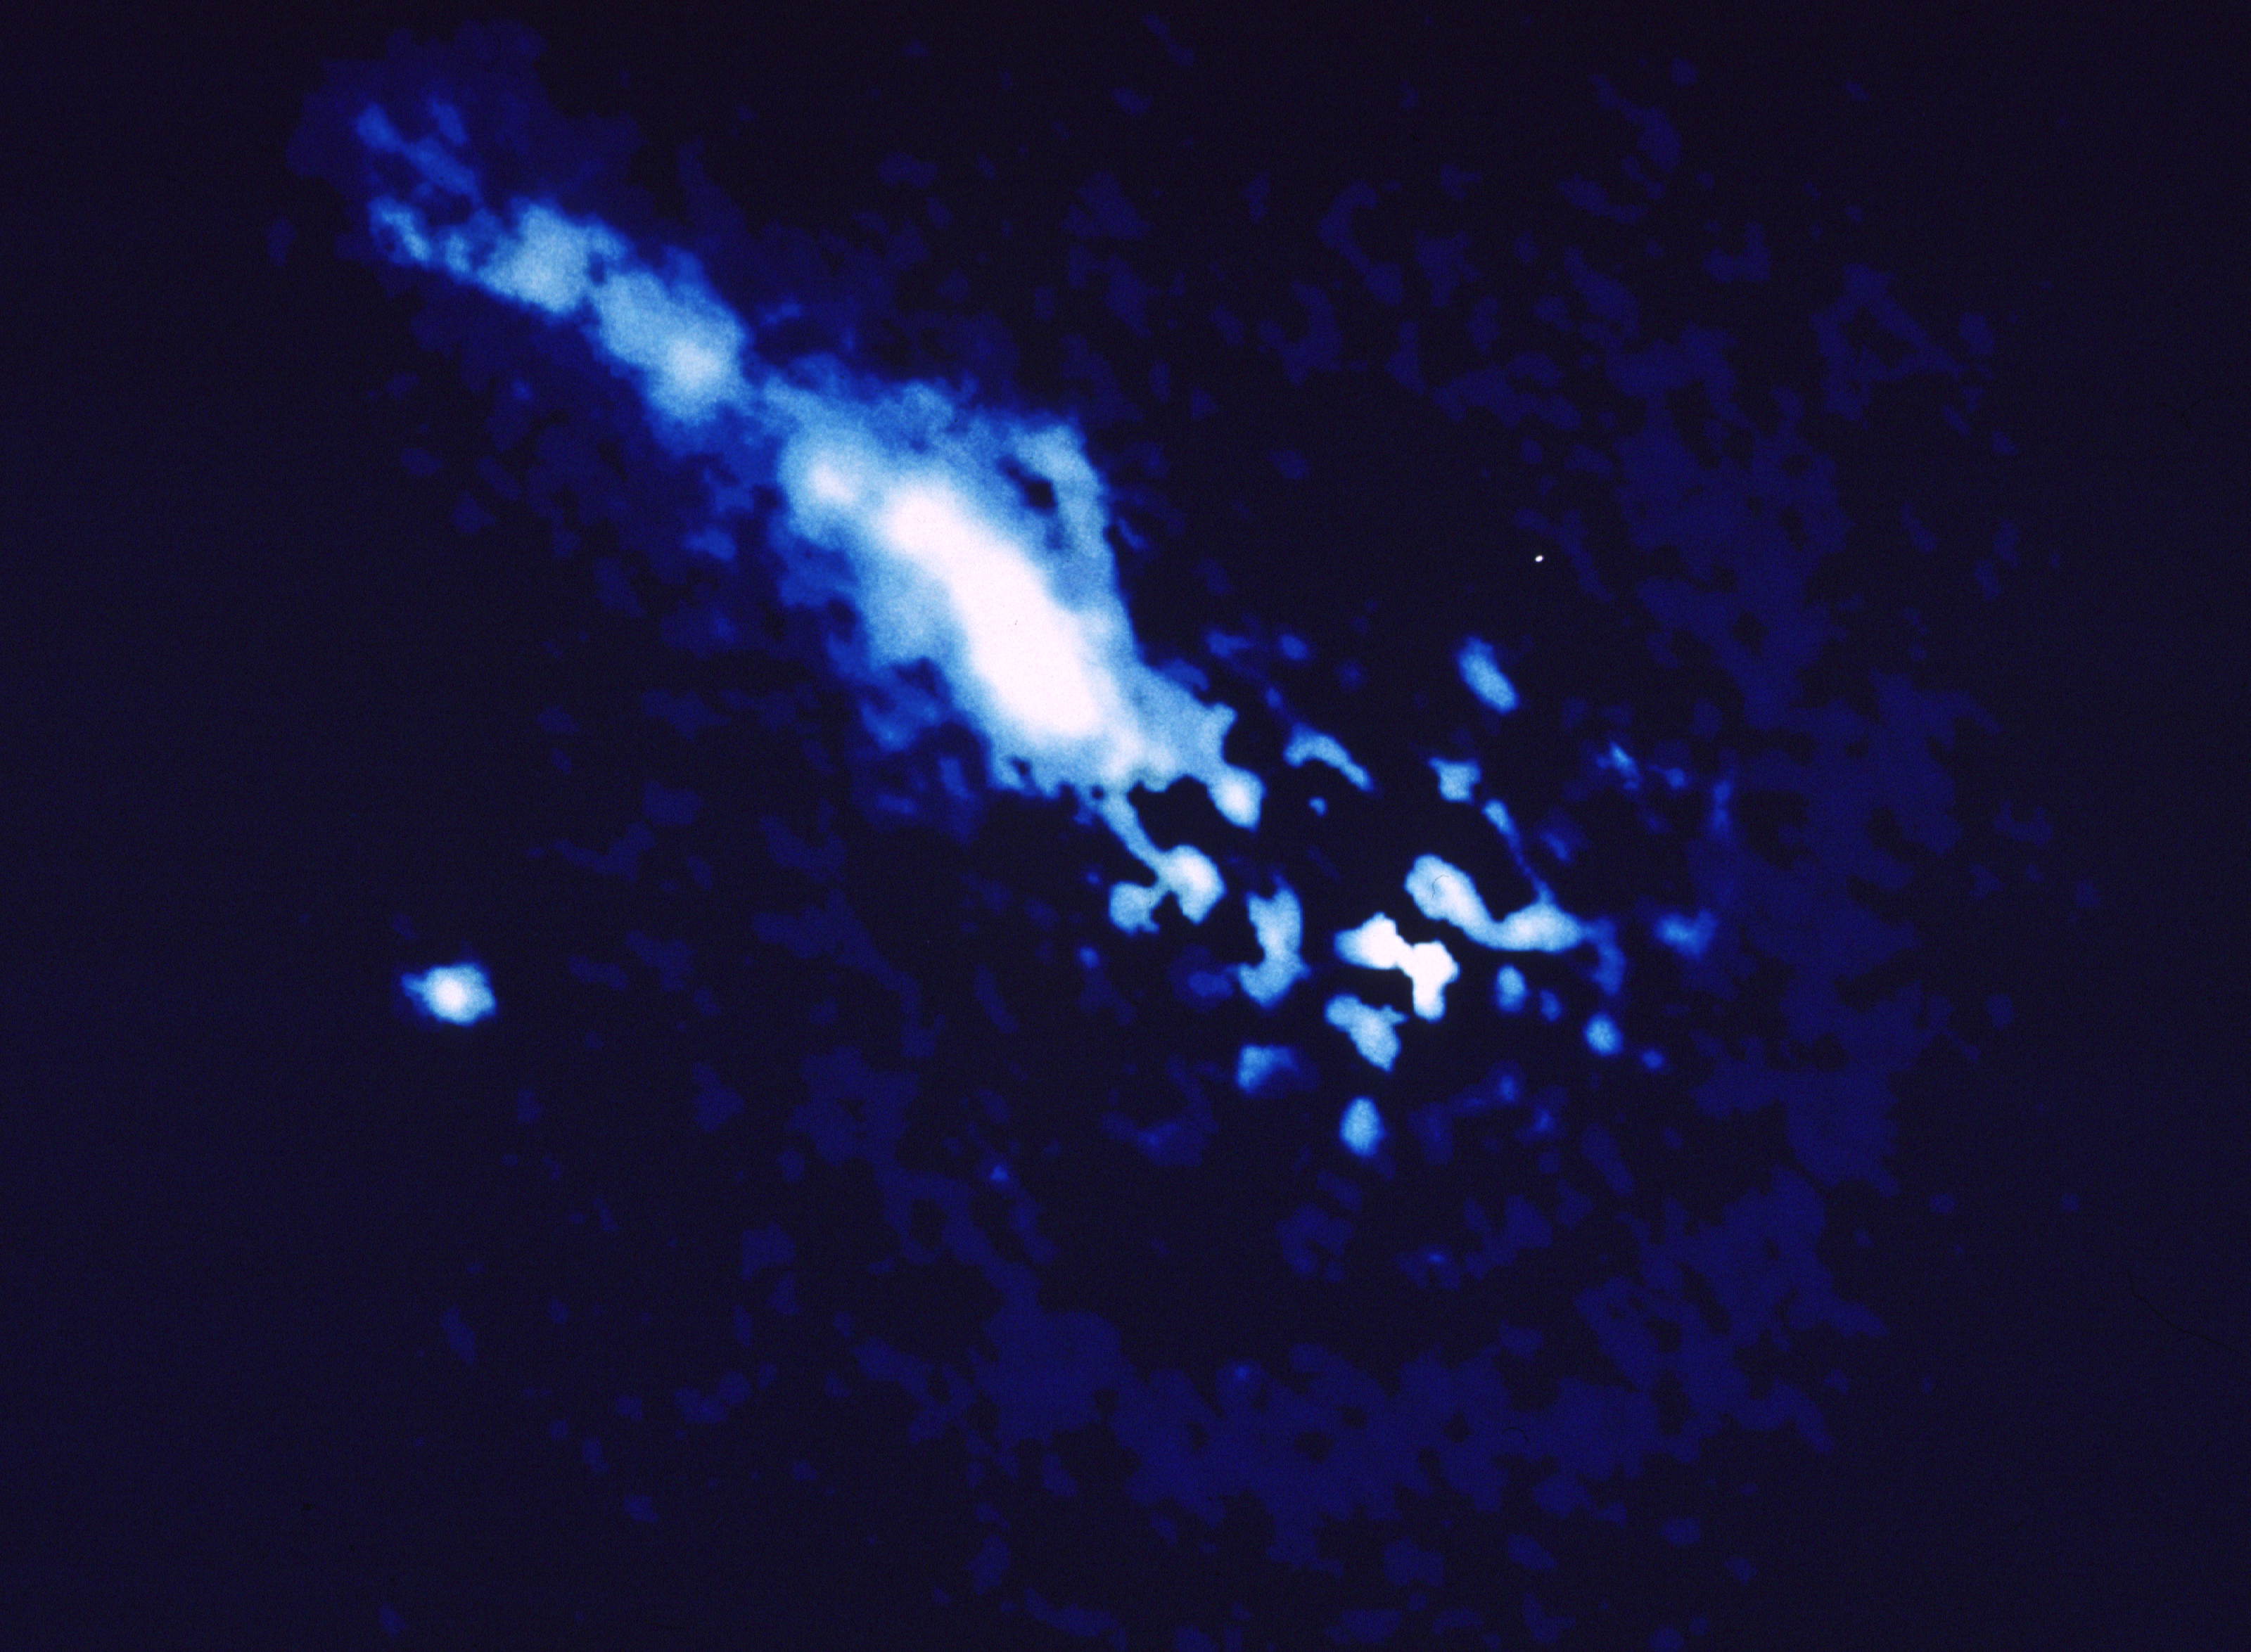

Braided galactic jet

This is a ten thousand light-year long jet of plasma observed by the European Space Agency's Faint Object Camera, aboard NASA/ESA Hubble Space Telescope. The image, which is much sharper than previous pictures taken with ground based telescopes. reveals unprecedented detail in the jet. The most remarkable feature is a distinctive twisted ladder structure produced by two spiral filaments of plasma. The pair of strands are separated by about 500 light-years. Other details reveal unusual knots and kinks in the outflowing material. The jet is produced by energetic activity at the core of the galaxy perhaps due to gravitational accretion of material onto a super massive black hole.

In this ultraviolet light picture the image of the host galaxy, 3C 668, has been subtracted to allow details in the jet to be traced all the way in to the galaxy's nucleus (center). Image reconstruction techniques have been applied to minimize the effects of spherical aberration produced by the HST's 2.4 meter primary mirror.

Credit: NASA and ESA